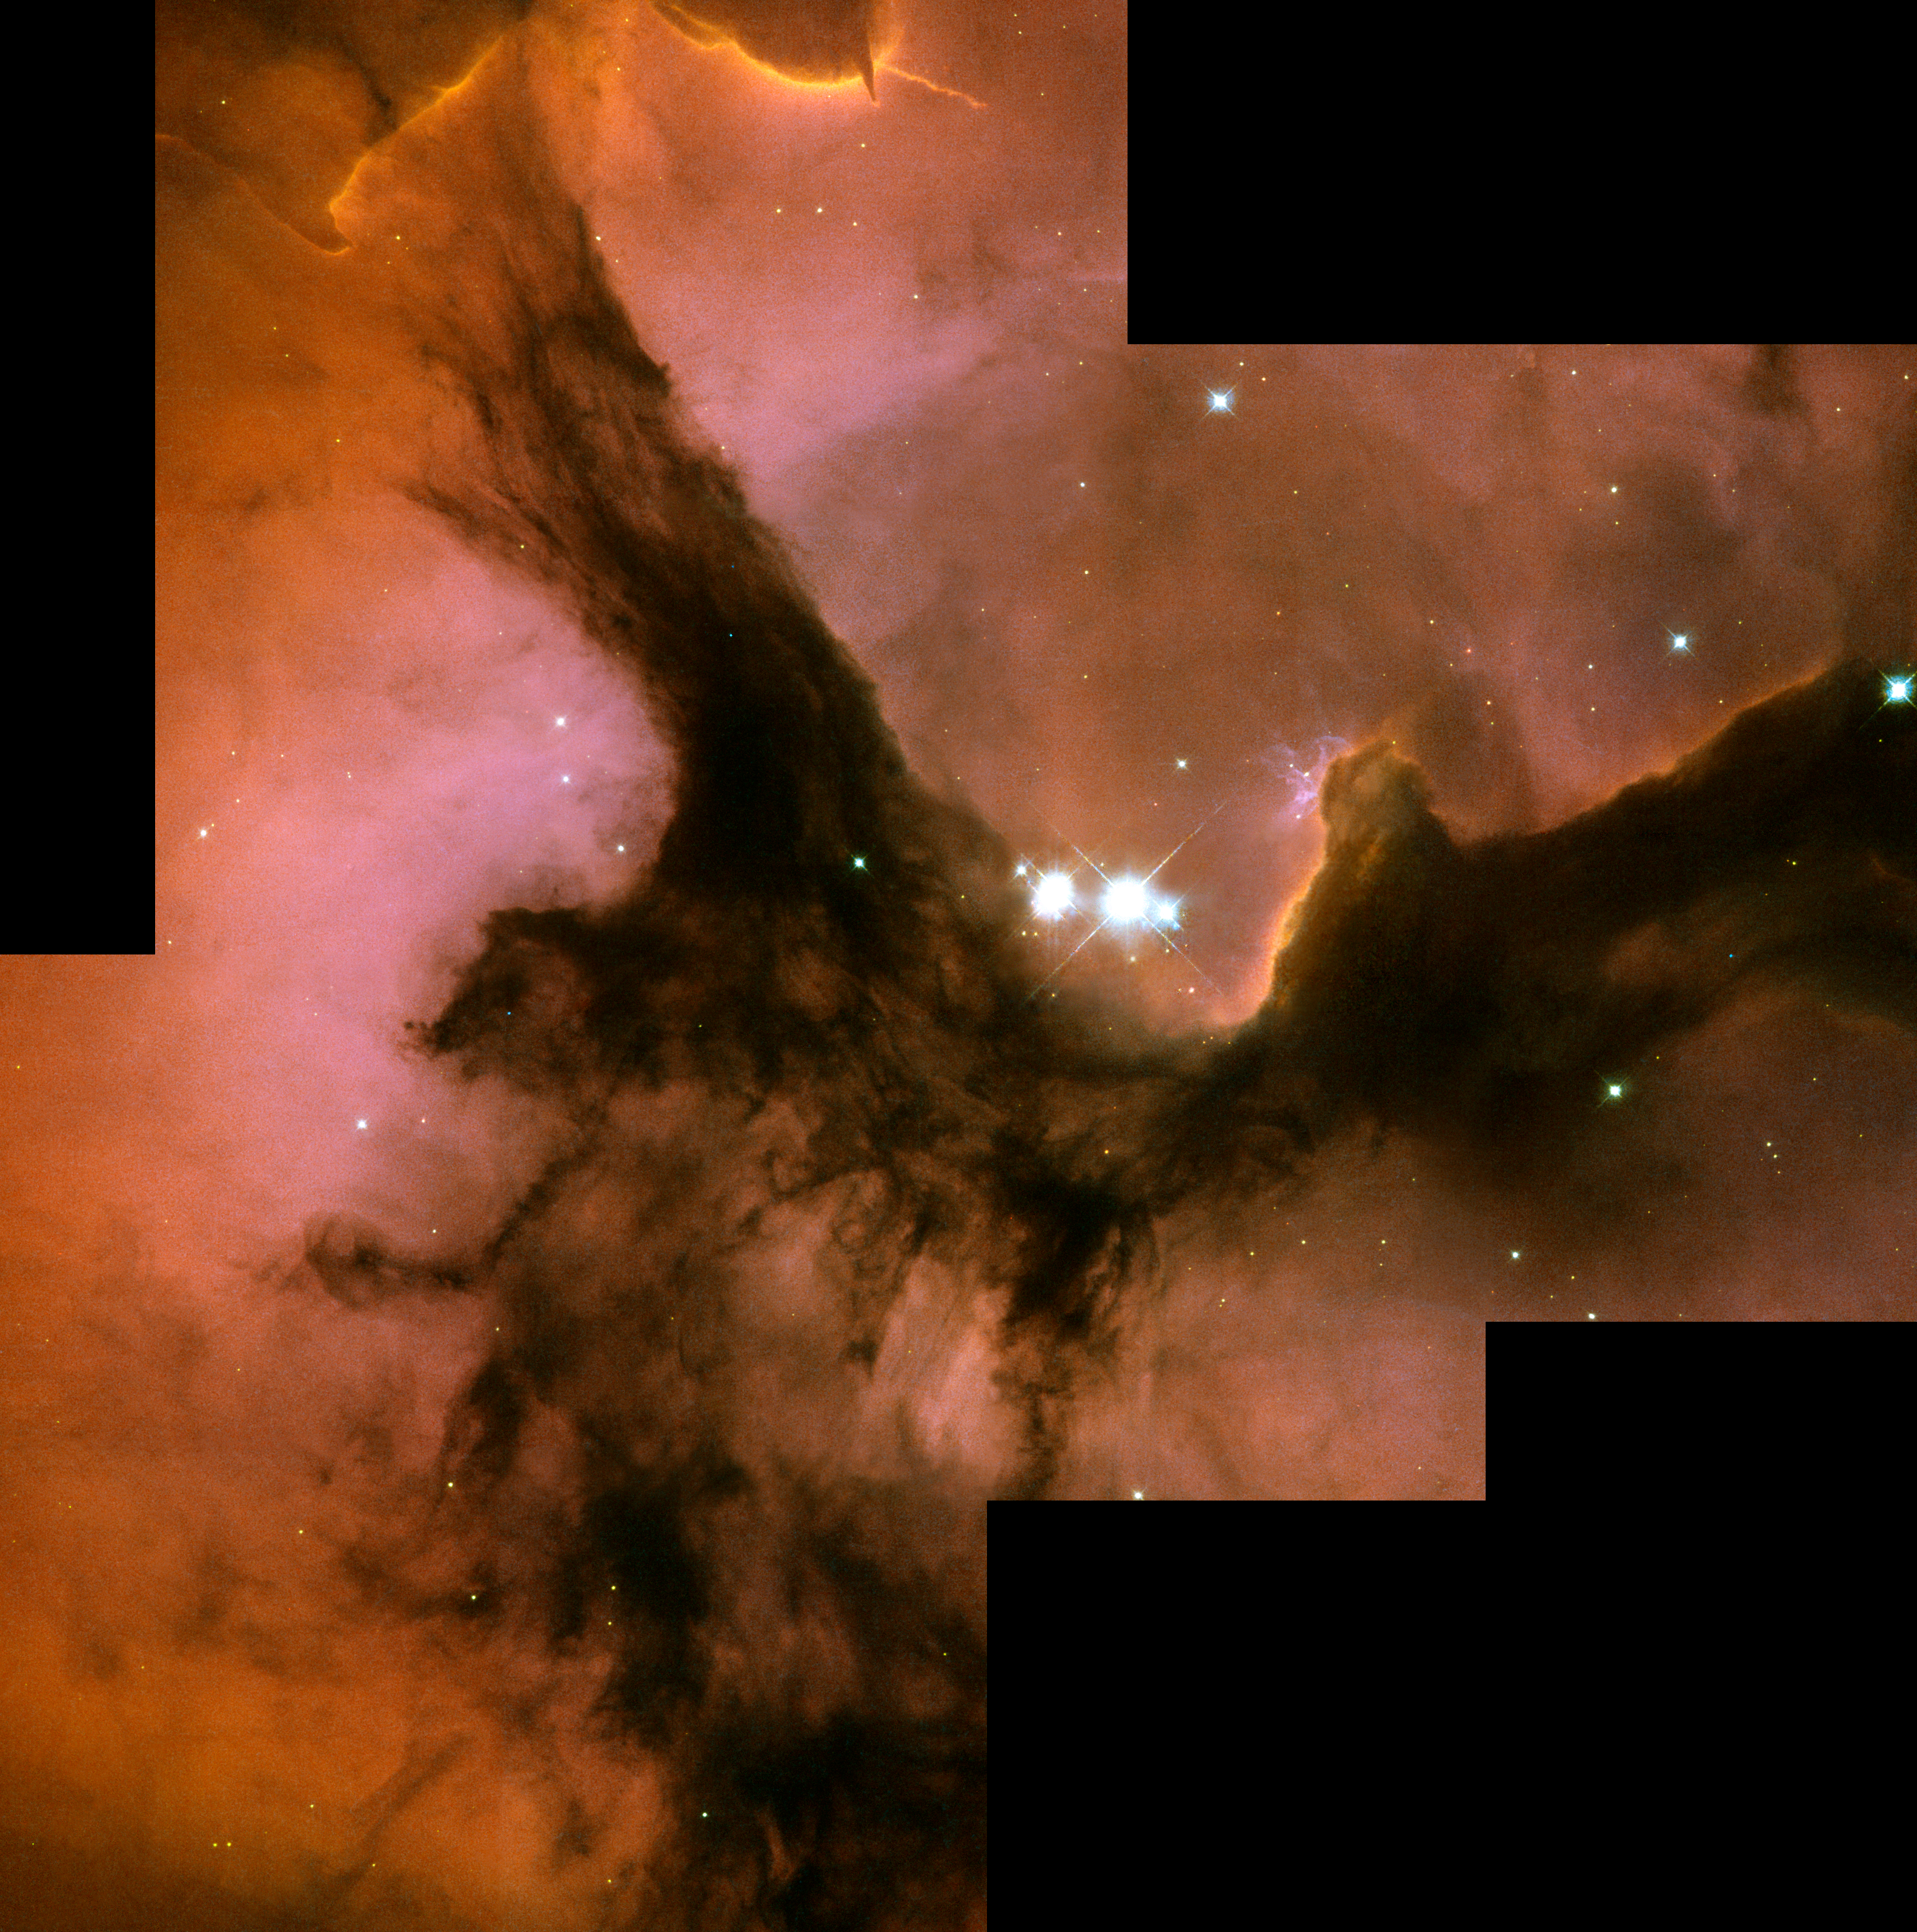

Full HST WFPC2 image of Trifid Nebula

Three huge intersecting dark lanes of interstellar dust make the Trifid Nebula one of the most recognizable and striking star birth regions in the night sky. The dust, silhouetted against glowing gas and illuminated by starlight, cradles the bright stars at the heart of the Trifid. This nebula, also known as Messier 20 and NGC 6514, lies within our own Milky Way Galaxy about 9,000 light-years from Earth, in the constellation Sagittarius. This image from NASA's Hubble Space Telescope, offers a close-up view of the center of the Trifid Nebula, near the intersection of the dust bands, where a group of recently formed, massive, bright stars is easily visible.

Credit: NASA, ESA, and The Hubble Heritage Team (AURA/STScI)